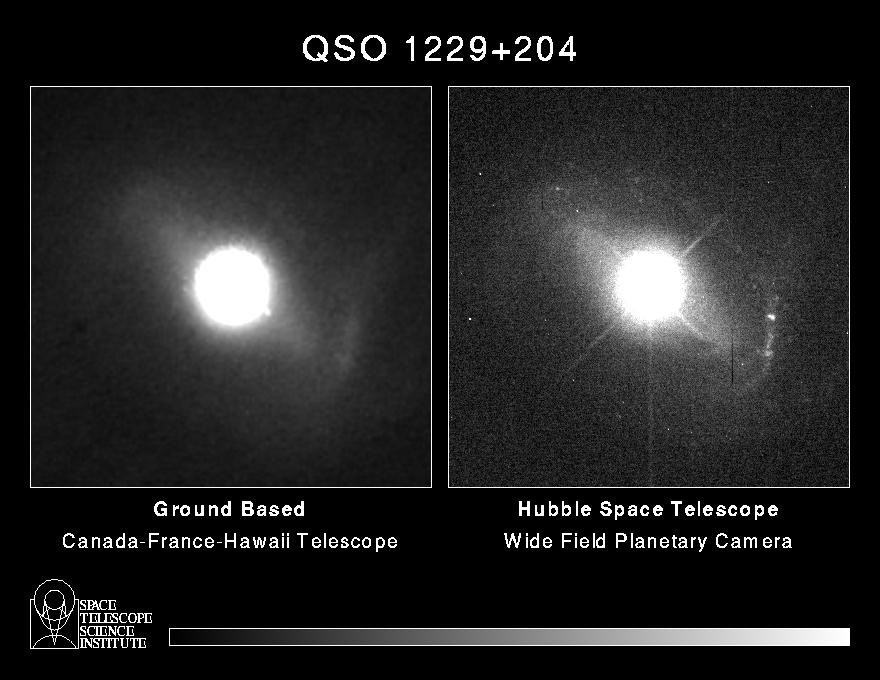

Quasar host galaxy

Quasars are the most distant objects in the universe, and so are among the earliest objects known to have formed in the young universe, more than 12 billion years ago. The most widely accepted notion is that quasars are in galaxies with active, supermassive black holes at their centers.

However, because of their enormous distance, the 'host' galaxies appear very small and faint, and are very hard to see against the much brighter quasar light at the center. Though a quasar might no be much larger than our solar system it releases as much energy as billions of stars.

Credit: Dr. John Hutchings, Dominion Astrophysical Observatory, NASA/ESA